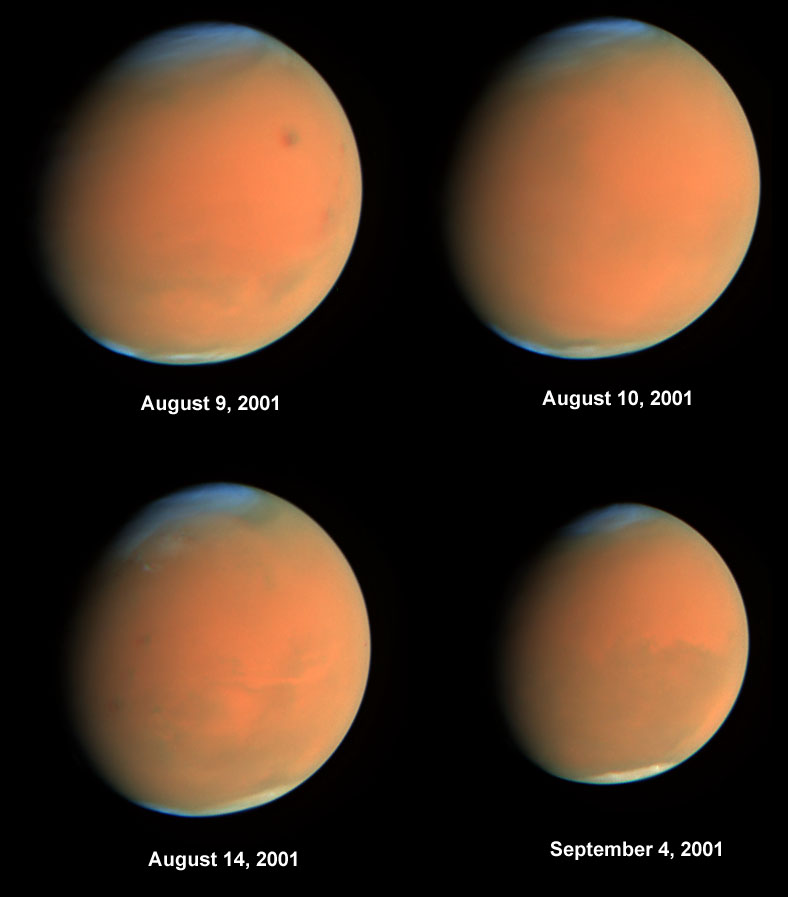

Four views of the global dust storm

The Hubble Space Telescope gave astronomers and scientists a ringside seat to the biggest global dust storm seen on Mars in several decades.

Credit: J. Bell (Cornell University)